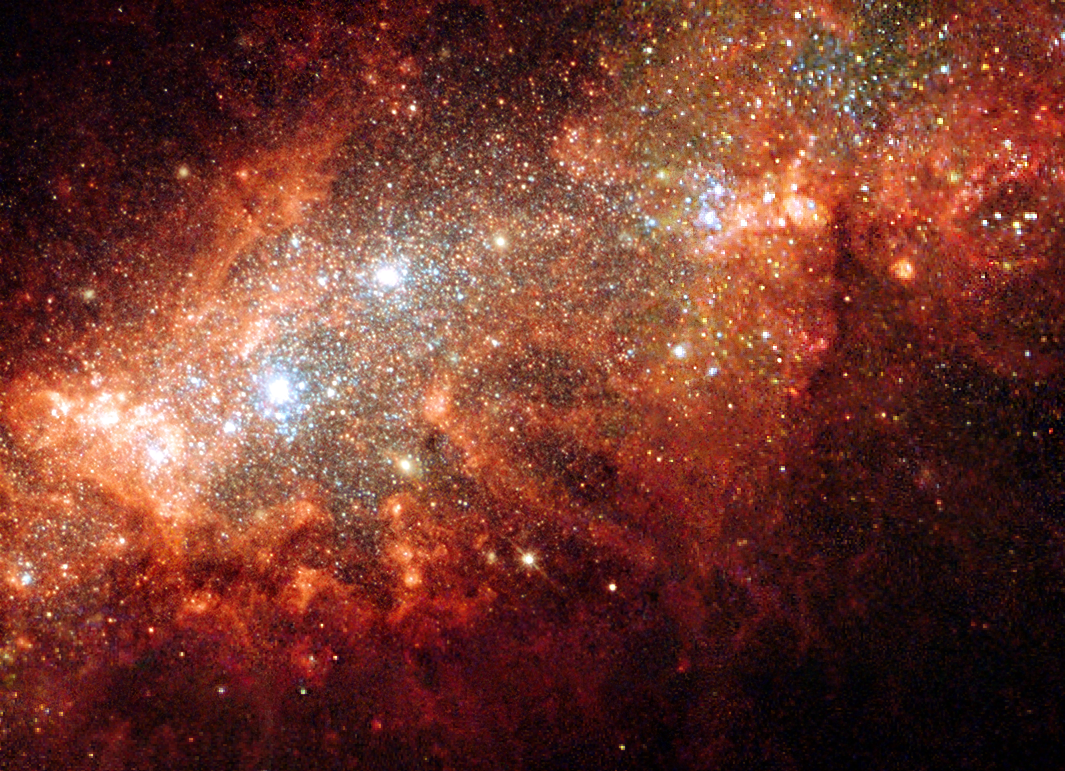

Supernova blast bonanza in nearby galaxy

The nearby dwarf galaxy NGC 1569 is a hotbed of vigorous star birth activity which blows huge bubbles and super-bubbles that riddle the main body of the galaxy. The galaxy's vigorous "star factories" are also manufacturing brilliant blue star clusters. This galaxy had a sudden and relatively recent onset of star birth 25 million years ago, which subsided about the time the very earliest human ancestors appeared on Earth.

In this new image, taken with the NASA/ESA Hubble Space Telescope, The bubble structure is sculpted by the galactic super-winds and outflows caused by a colossal input of energy from collective supernova explosions that are linked with a massive episode of star birth.

The bubble-like structures seen in this image are made of hydrogen gas that glows when hit by the fierce winds and radiation from hot young stars and is racked by supernovae shocks. The first supernovae blew up when the most massive stars reached the end of their lifetimes roughly 20-25 million years ago. The environment in NGC 1569 is still turbulent and the supernovae may not only deliver the gaseous raw material needed for the formation of further stars and star clusters, but also actually trigger their birth in the tortured swirls of gas.

Credit: European Space Agency, NASA & Peter Anders (Göttingen University Galaxy Evolution Group, Germany)